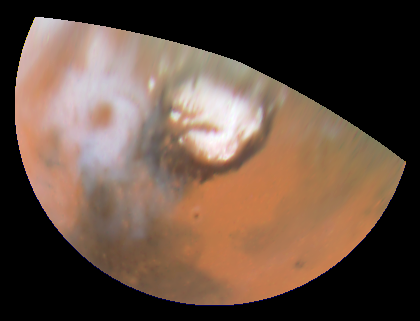

Hubble Views Collossal Polar Cyclone on Mars

Color polar view of the north polar region, showing the location of the storm relative to the classical bright and dark features in this area. The colour composite data (410, 502, and 673 nm) indicate that the storm is fairly dust-free and therefore likely composed mostly of water ice clouds. The bright surface region beneath the eye of the storm can be seen clearly. This map covers the region north of 45 degrees latitude, and is oriented with 0 degrees longitude at the bottom.

Credit: Jim Bell (Cornell U.), Steve Lee (U. Colorado), Mike Wolff (SSI), andNASA/ESA